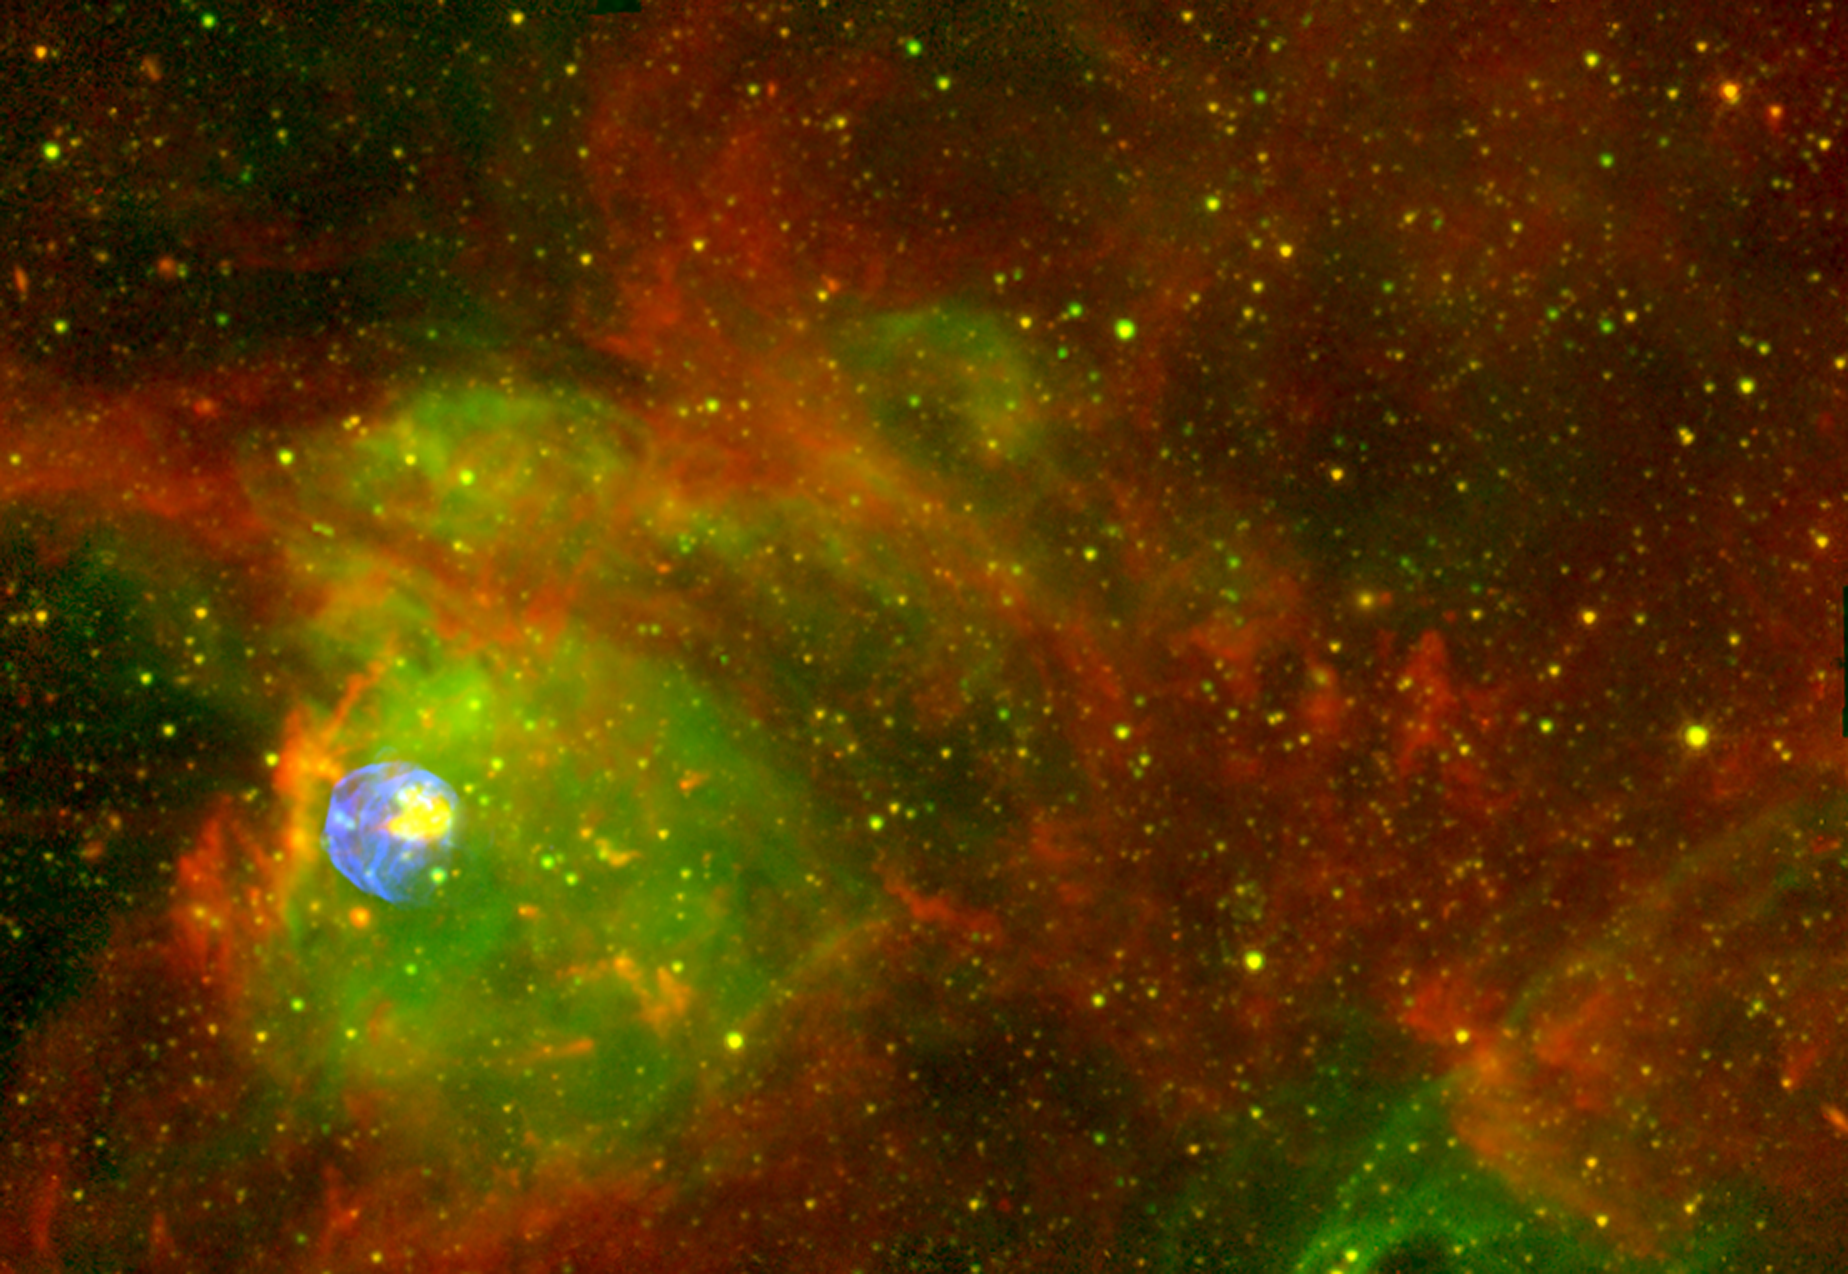

Spitzer, Chandra, CTIO Image of N 63A - Wide Field

A colour composite of Spitzer infrared, Chandra X-ray and ground-based Halpha. The colour assignments are: Chandra (all bands) (blue), CTIO ground-based H-alpha (green), Spitzer 4.5 micron (yellow) and Spitzer 8.0 micron (red).

Credit: NASA/JPL-Caltech/CXC/NOAO/AURA/NSF